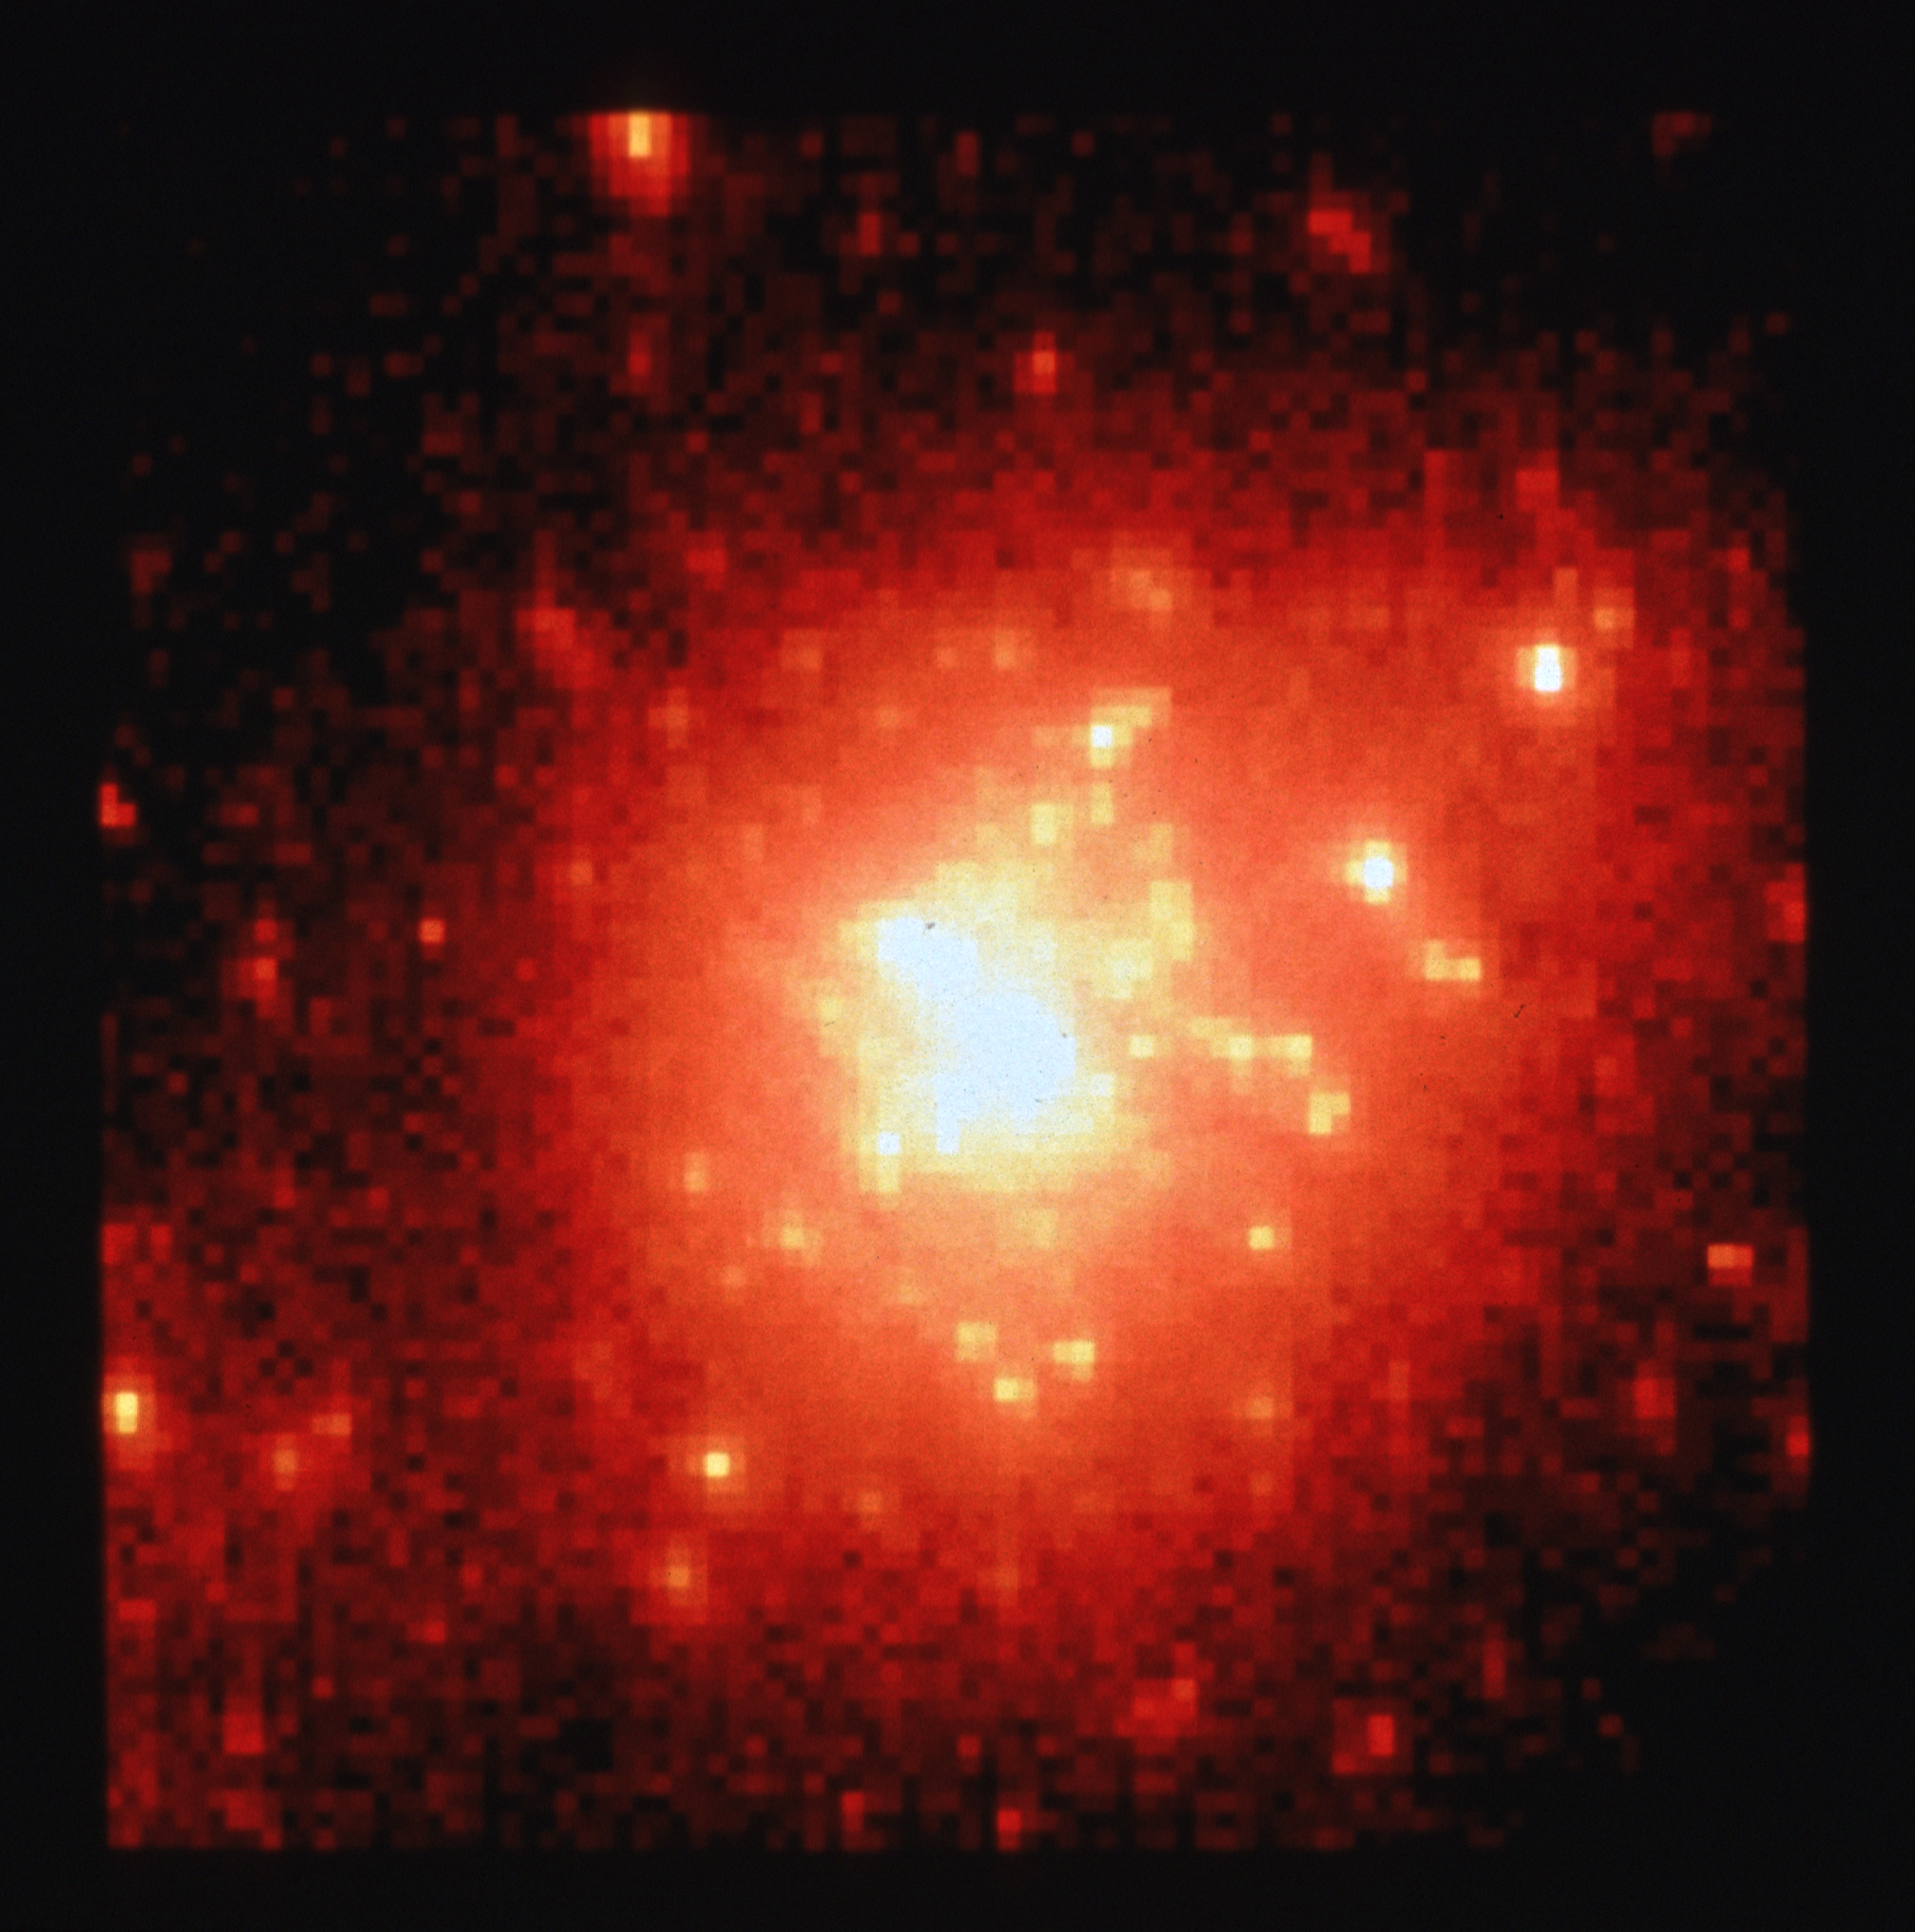

Star cluster R136 - wide field and planetary camera

This unprocessed image, taken with NASA/ESA Hubble Space Telescope, yields stellar diameters of 0.1 arc second, allowing many more stars to be distinguished than in previous ground-based telescope images.

Credit: NASA/ESA